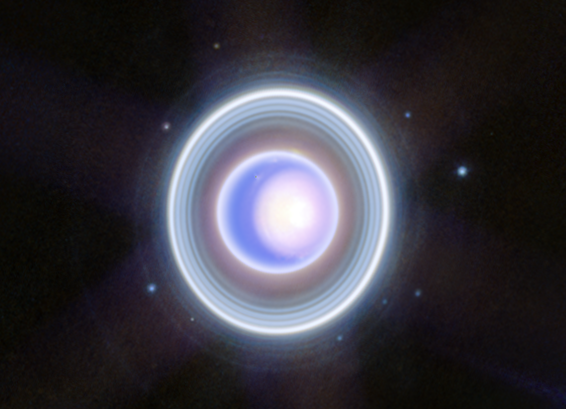

Uranus close-up view (NIRCam)

This image of Uranus from NIRCam (Near-Infrared Camera) on the NASA/ESA/CSA James Webb Space Telescope shows the planet and its rings in new clarity. The Webb image exquisitely captures Uranus’s seasonal north polar cap, including the bright, white, inner cap and the dark lane in the bottom of the polar cap. Uranus’ dim inner and outer rings are also visible in this image, including the elusive Zeta ring—the extremely faint and diffuse ring closest to the planet.

This Webb image also shows 9 of the planet’s 27 moons. They are the blue dots that surround the planet’s rings. Clockwise starting at 2 o’clock, they are: Rosalind, Puck, Belinda, Desdemona, Cressida, Bianca, Portia, Juliet, and Perdita. The orbits of these moons share the 98-degree tilt of their parent planet relative to the plane of the solar system.

One day on Uranus is about 17 hours, so the planet’s rotation is relatively quick. This makes it supremely difficult for observatories with a sharp eye like Webb to capture one simple image of the entire planet – storms and other atmospheric features, and the planet’s moons, move visibly within minutes. This image combines several longer and shorter exposures of this dynamic system to correct for those slight changes throughout the observing time

Credit: NASA, ESA, CSA, STScI